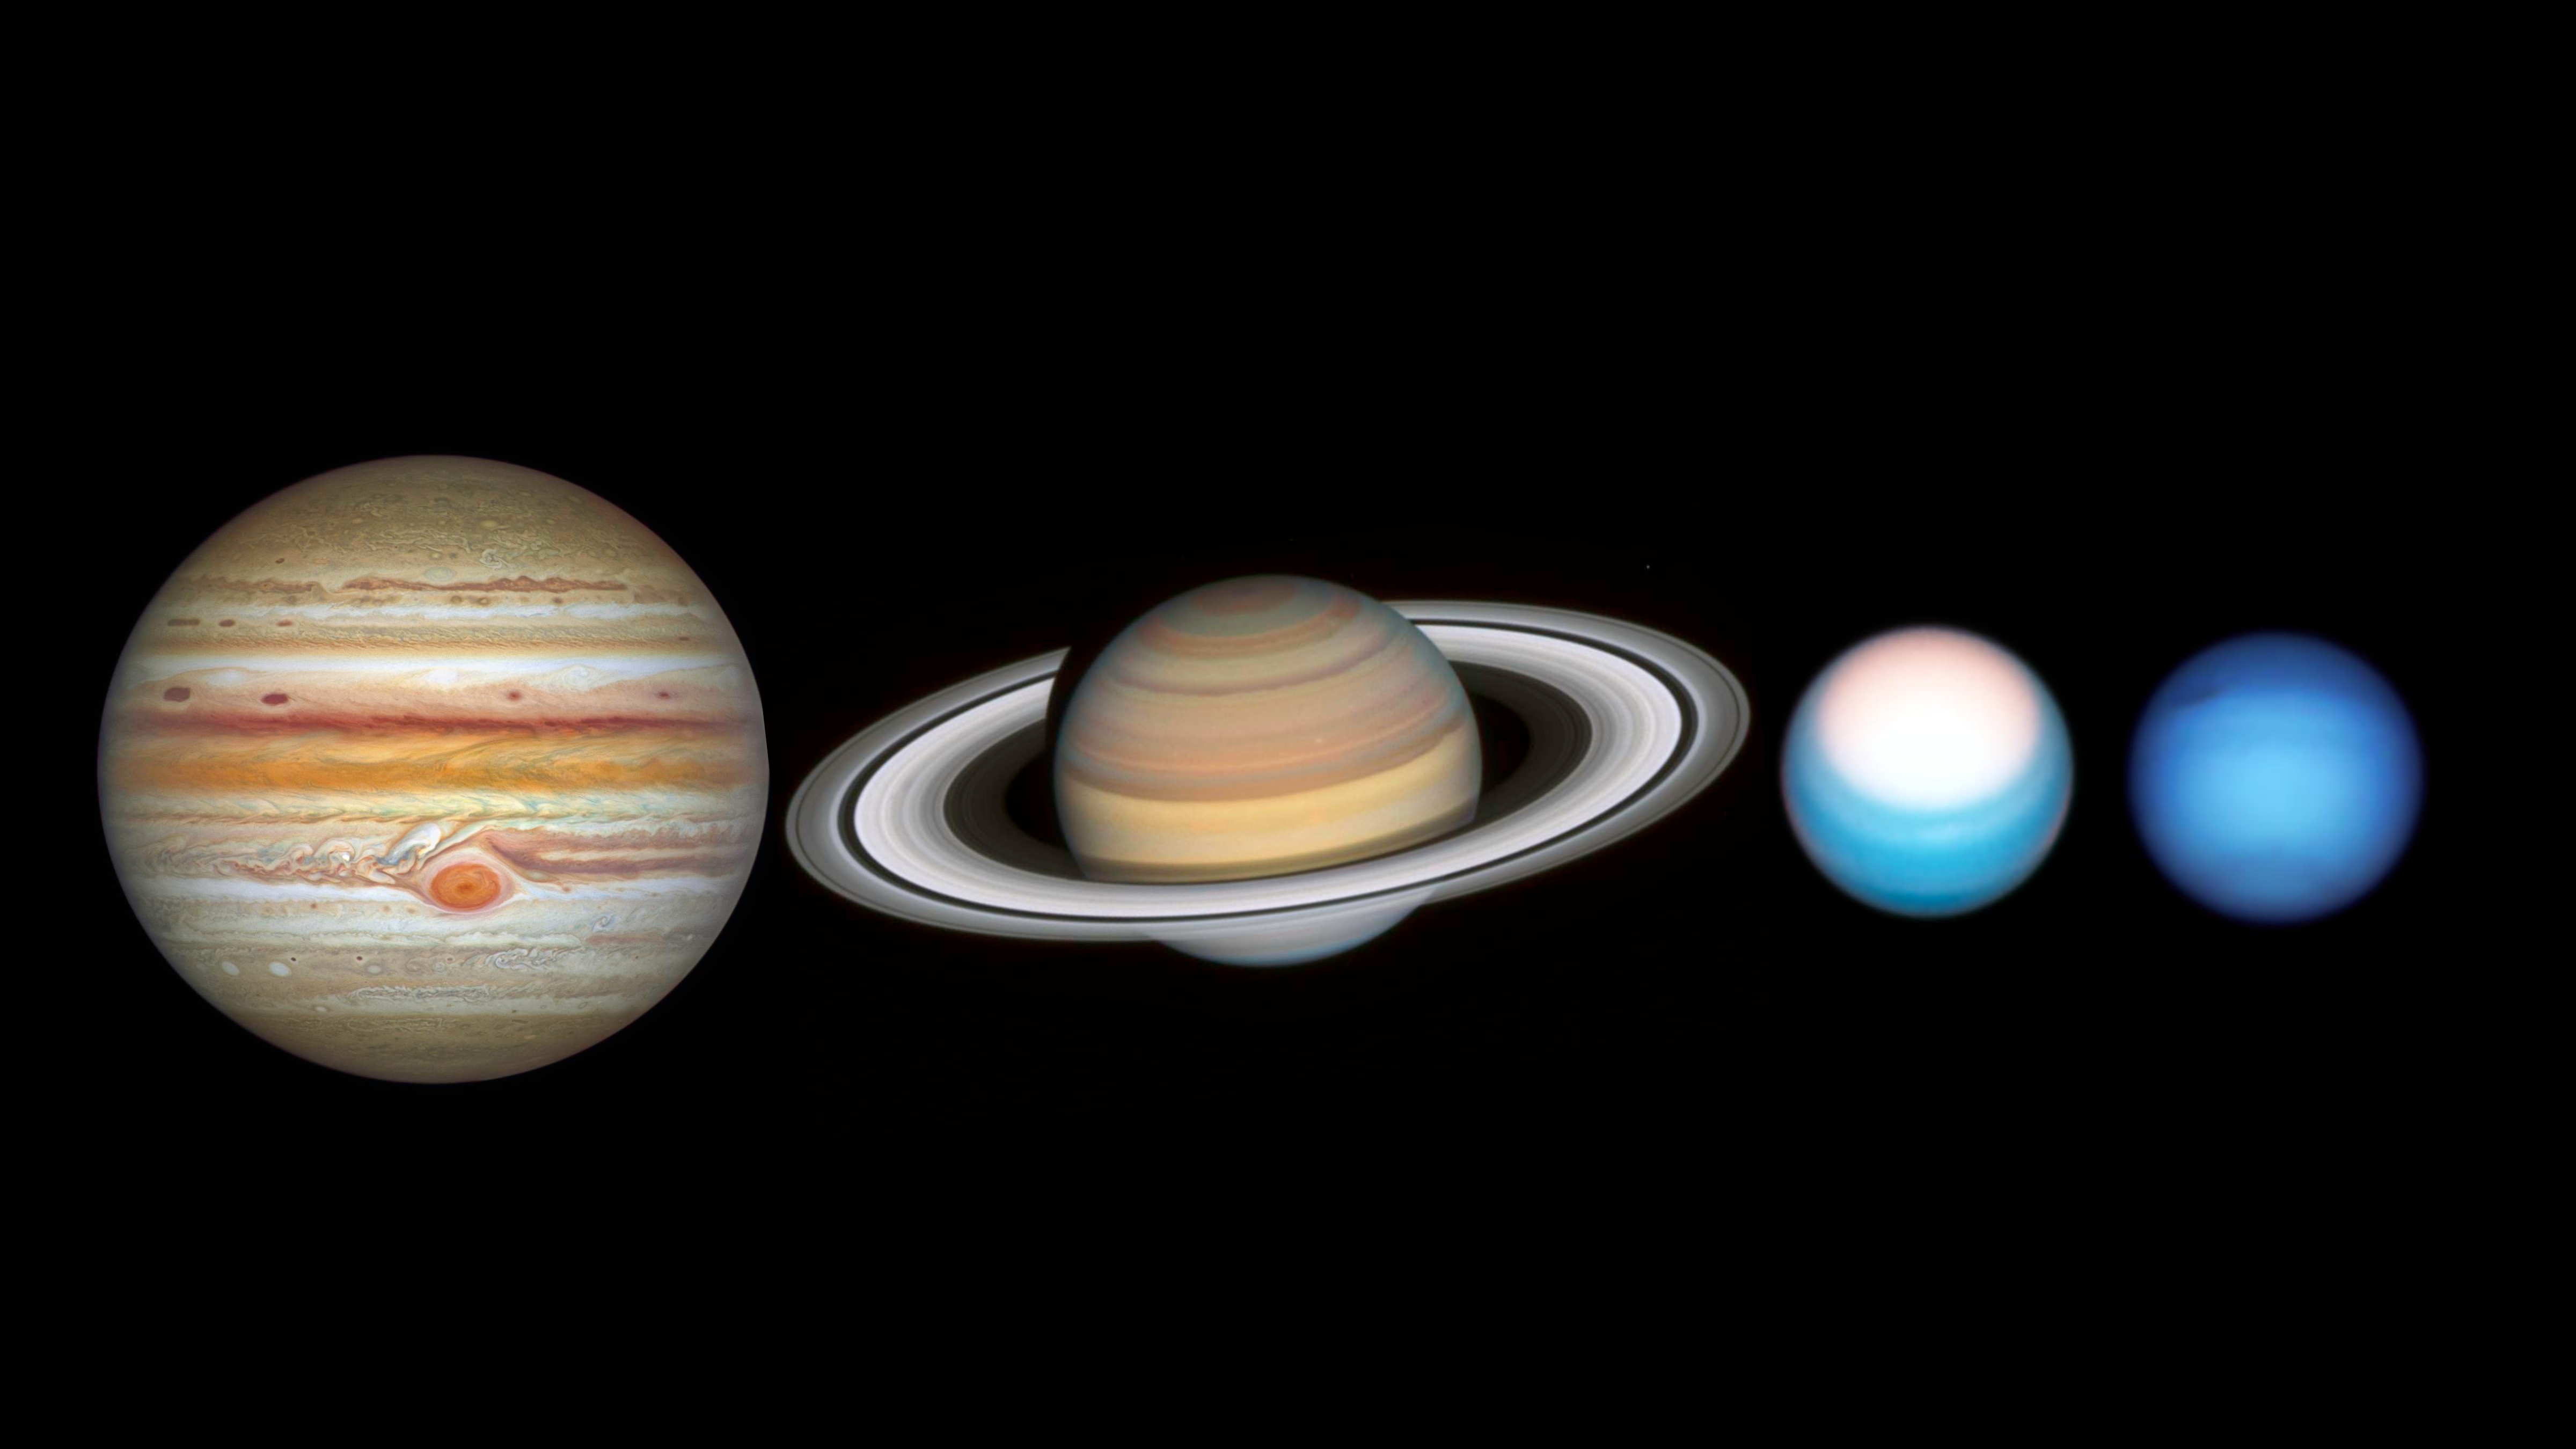

Hubble Takes a Grand Tour of the Solar System

The NASA/ESA Hubble Space Telescope has completed its annual grand tour of the outer Solar System for 2021. This is the realm of the giant planets — Jupiter, Saturn, Uranus, and Neptune — extending as far as 30 times the distance between Earth and the Sun. Unlike the rocky terrestrial planets like Earth and Mars that huddle close to the Sun’s warmth, these far-flung worlds are mostly composed of chilly gaseous soups of hydrogen, helium, ammonia, and methane around a packed, intensely hot, compact core.

Note: The planets are not shown to scale in this image.

Credit: NASA, ESA, A. Simon (Goddard Space Flight Center), and M.H. Wong (University of California, Berkeley) and the OPAL team